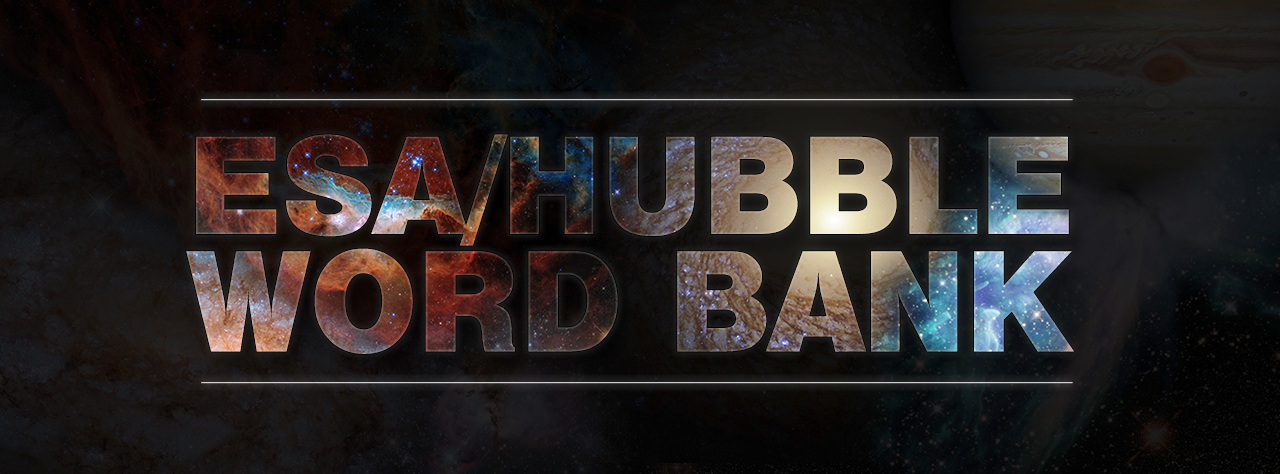

The ESA/Hubble Word Bank

The latest project developed by the ESA/Hubble outreach team is the ESA/Hubble Word Bank. This resource was developed to be an informative and educative resource for students, parents, educators, communicators, and the general public alike. Each of the words featured in this unique glossary is accompanied by a simple definition and an explanation of various astronomical concepts and objects in simple and accessible language. These descriptions also provide context and connections to Hubble’s relevance and contributions to the respective areas or objects of research.

Credit: ESA/Hubble